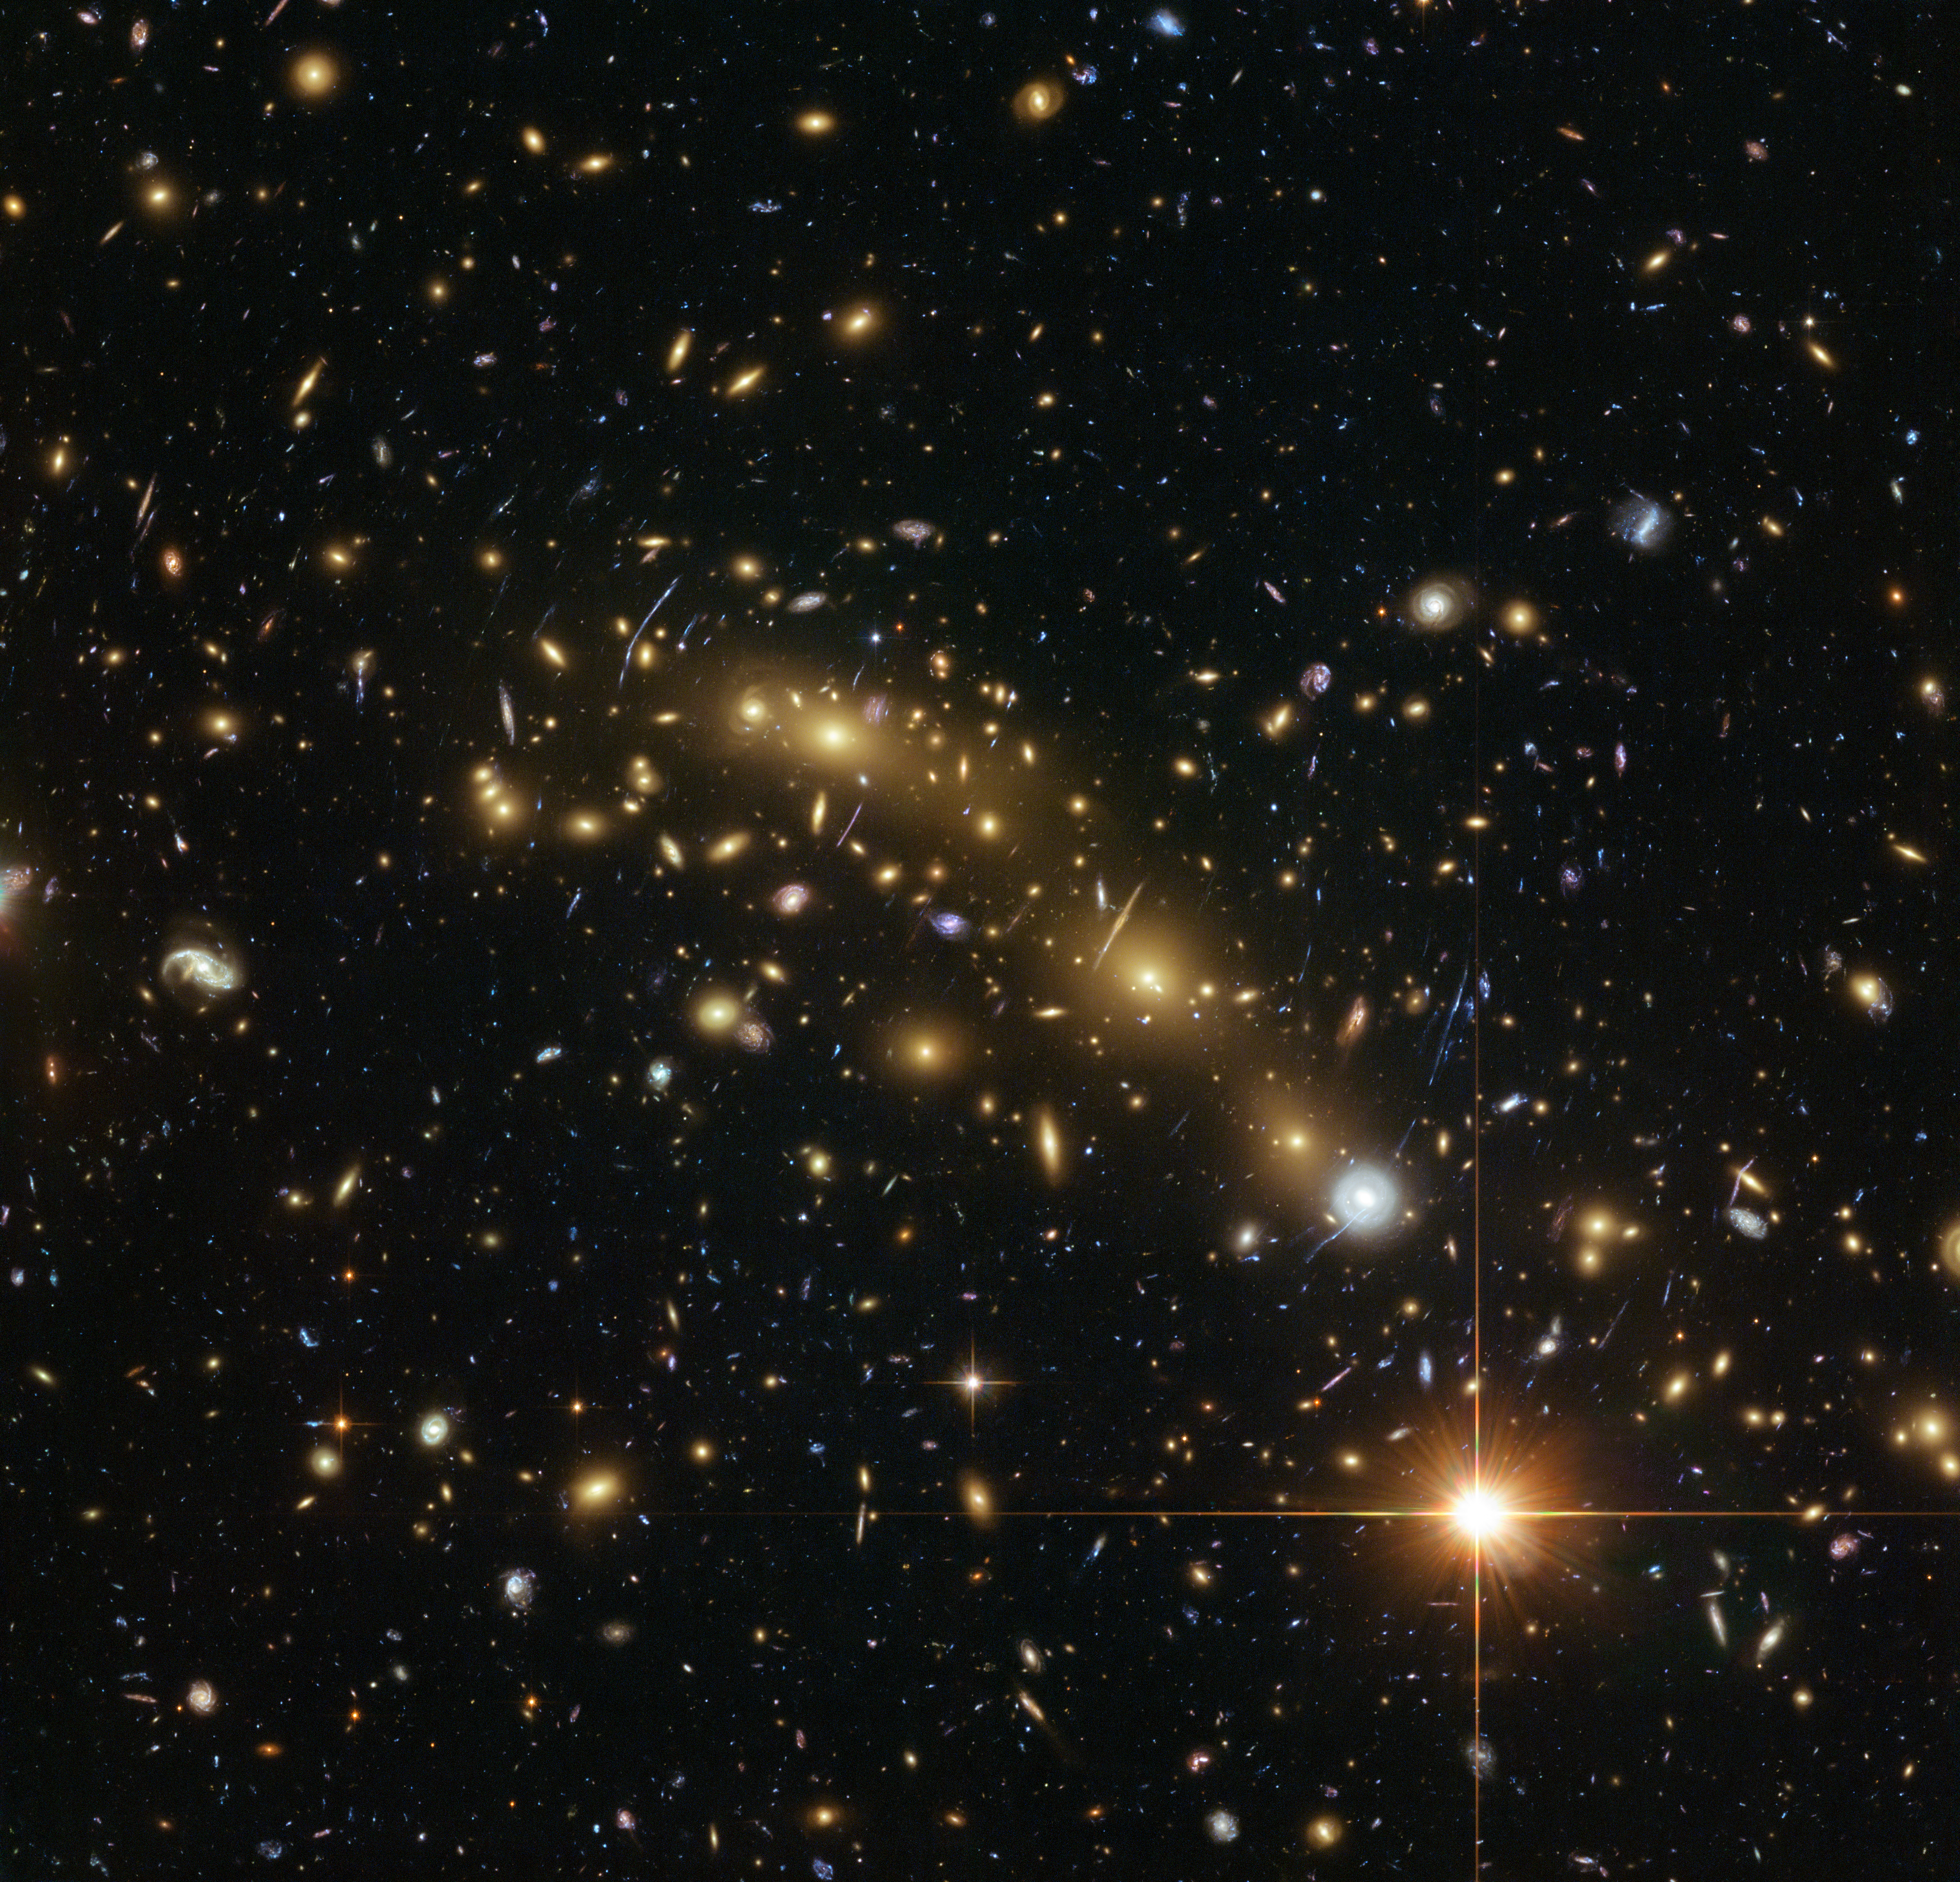

Hubble image of galaxy cluster MACS J0416.1–2403

This image from the NASA/ESA Hubble Space Telescope shows the galaxy cluster MACS J0416.1–2403. This is one of six being studied by the Hubble Frontier Fields programme. This programme seeks to analyse the mass distribution in these huge clusters and to use the gravitational lensing effect of these clusters, to peer even deeper into the distant Universe.

A team of researchers used almost 200 images of distant galaxies, whose light has been bent and magnified by this huge cluster, combined with the depth of Hubble data to measure the total mass of this cluster more precisely than ever before.

Credit: ESA/Hubble, NASA, HST Frontier Fields Acknowledgement: Mathilde Jauzac (Durham University, UK and Astrophysics & Cosmology Research Unit, South Africa) and Jean-Paul Kneib (École Polytechnique Fédérale de Lausanne, Switzerland)